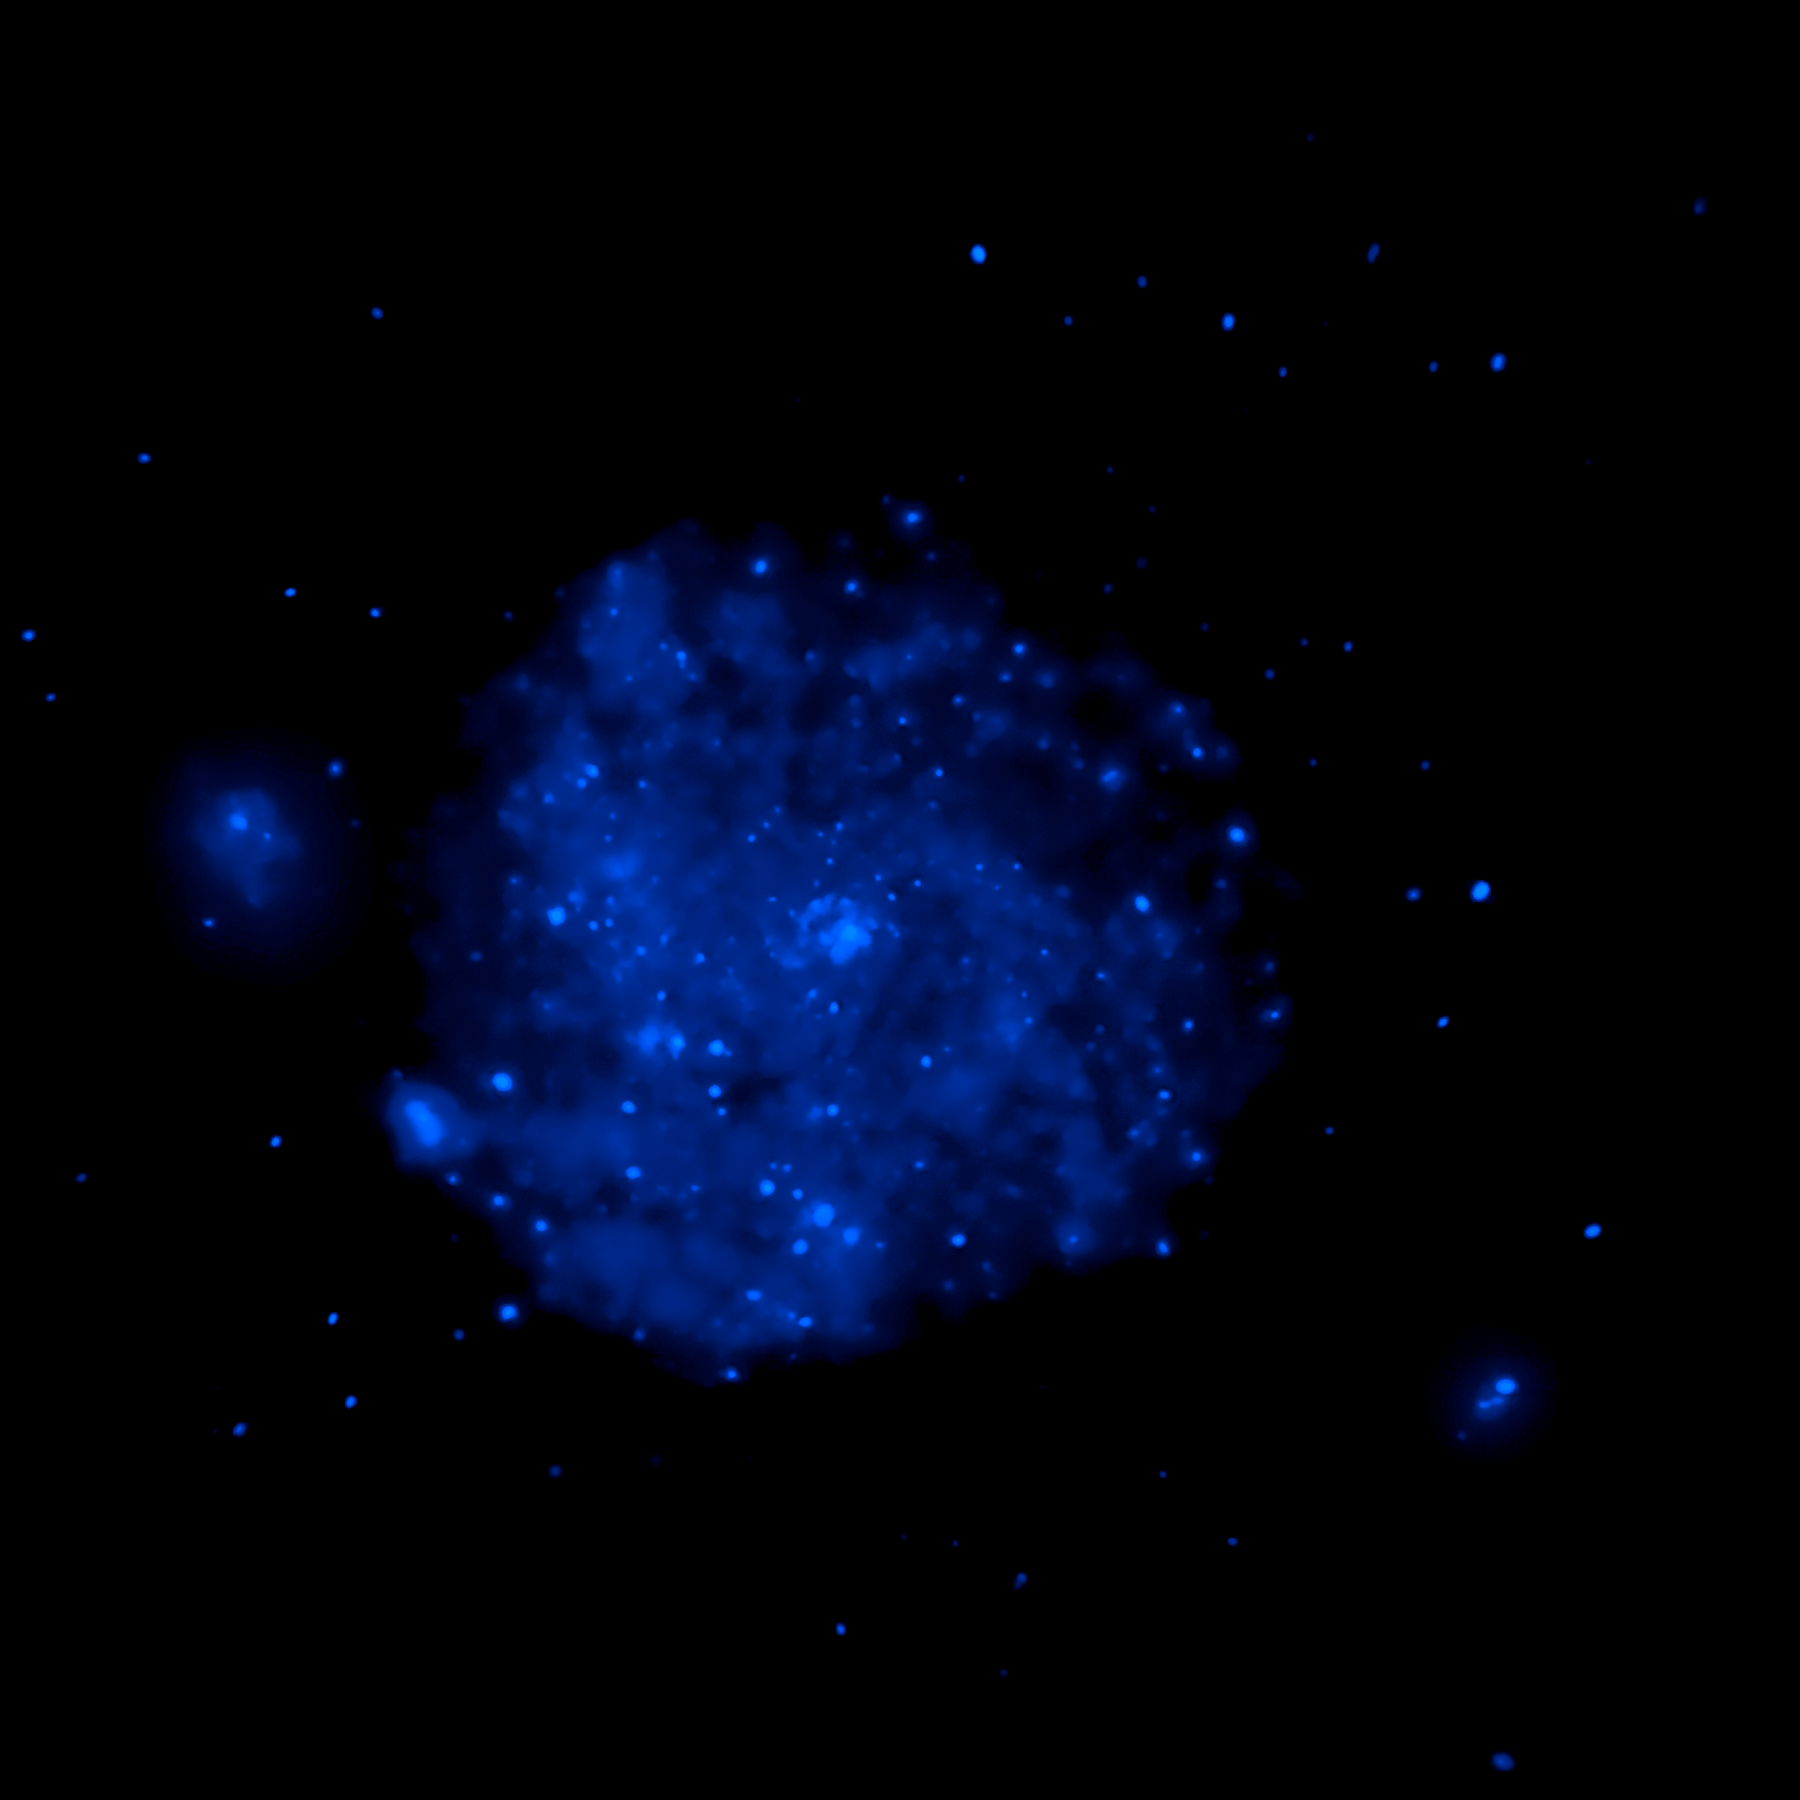

M101 composite image: Chandra data (blue component)

The blue colour shows Chandra's view in X-ray light. Sources of X-rays include million-degree gas, exploded stars, and material colliding around black holes.

Credit: NASA, CXC, and K. Kuntz (JHU)